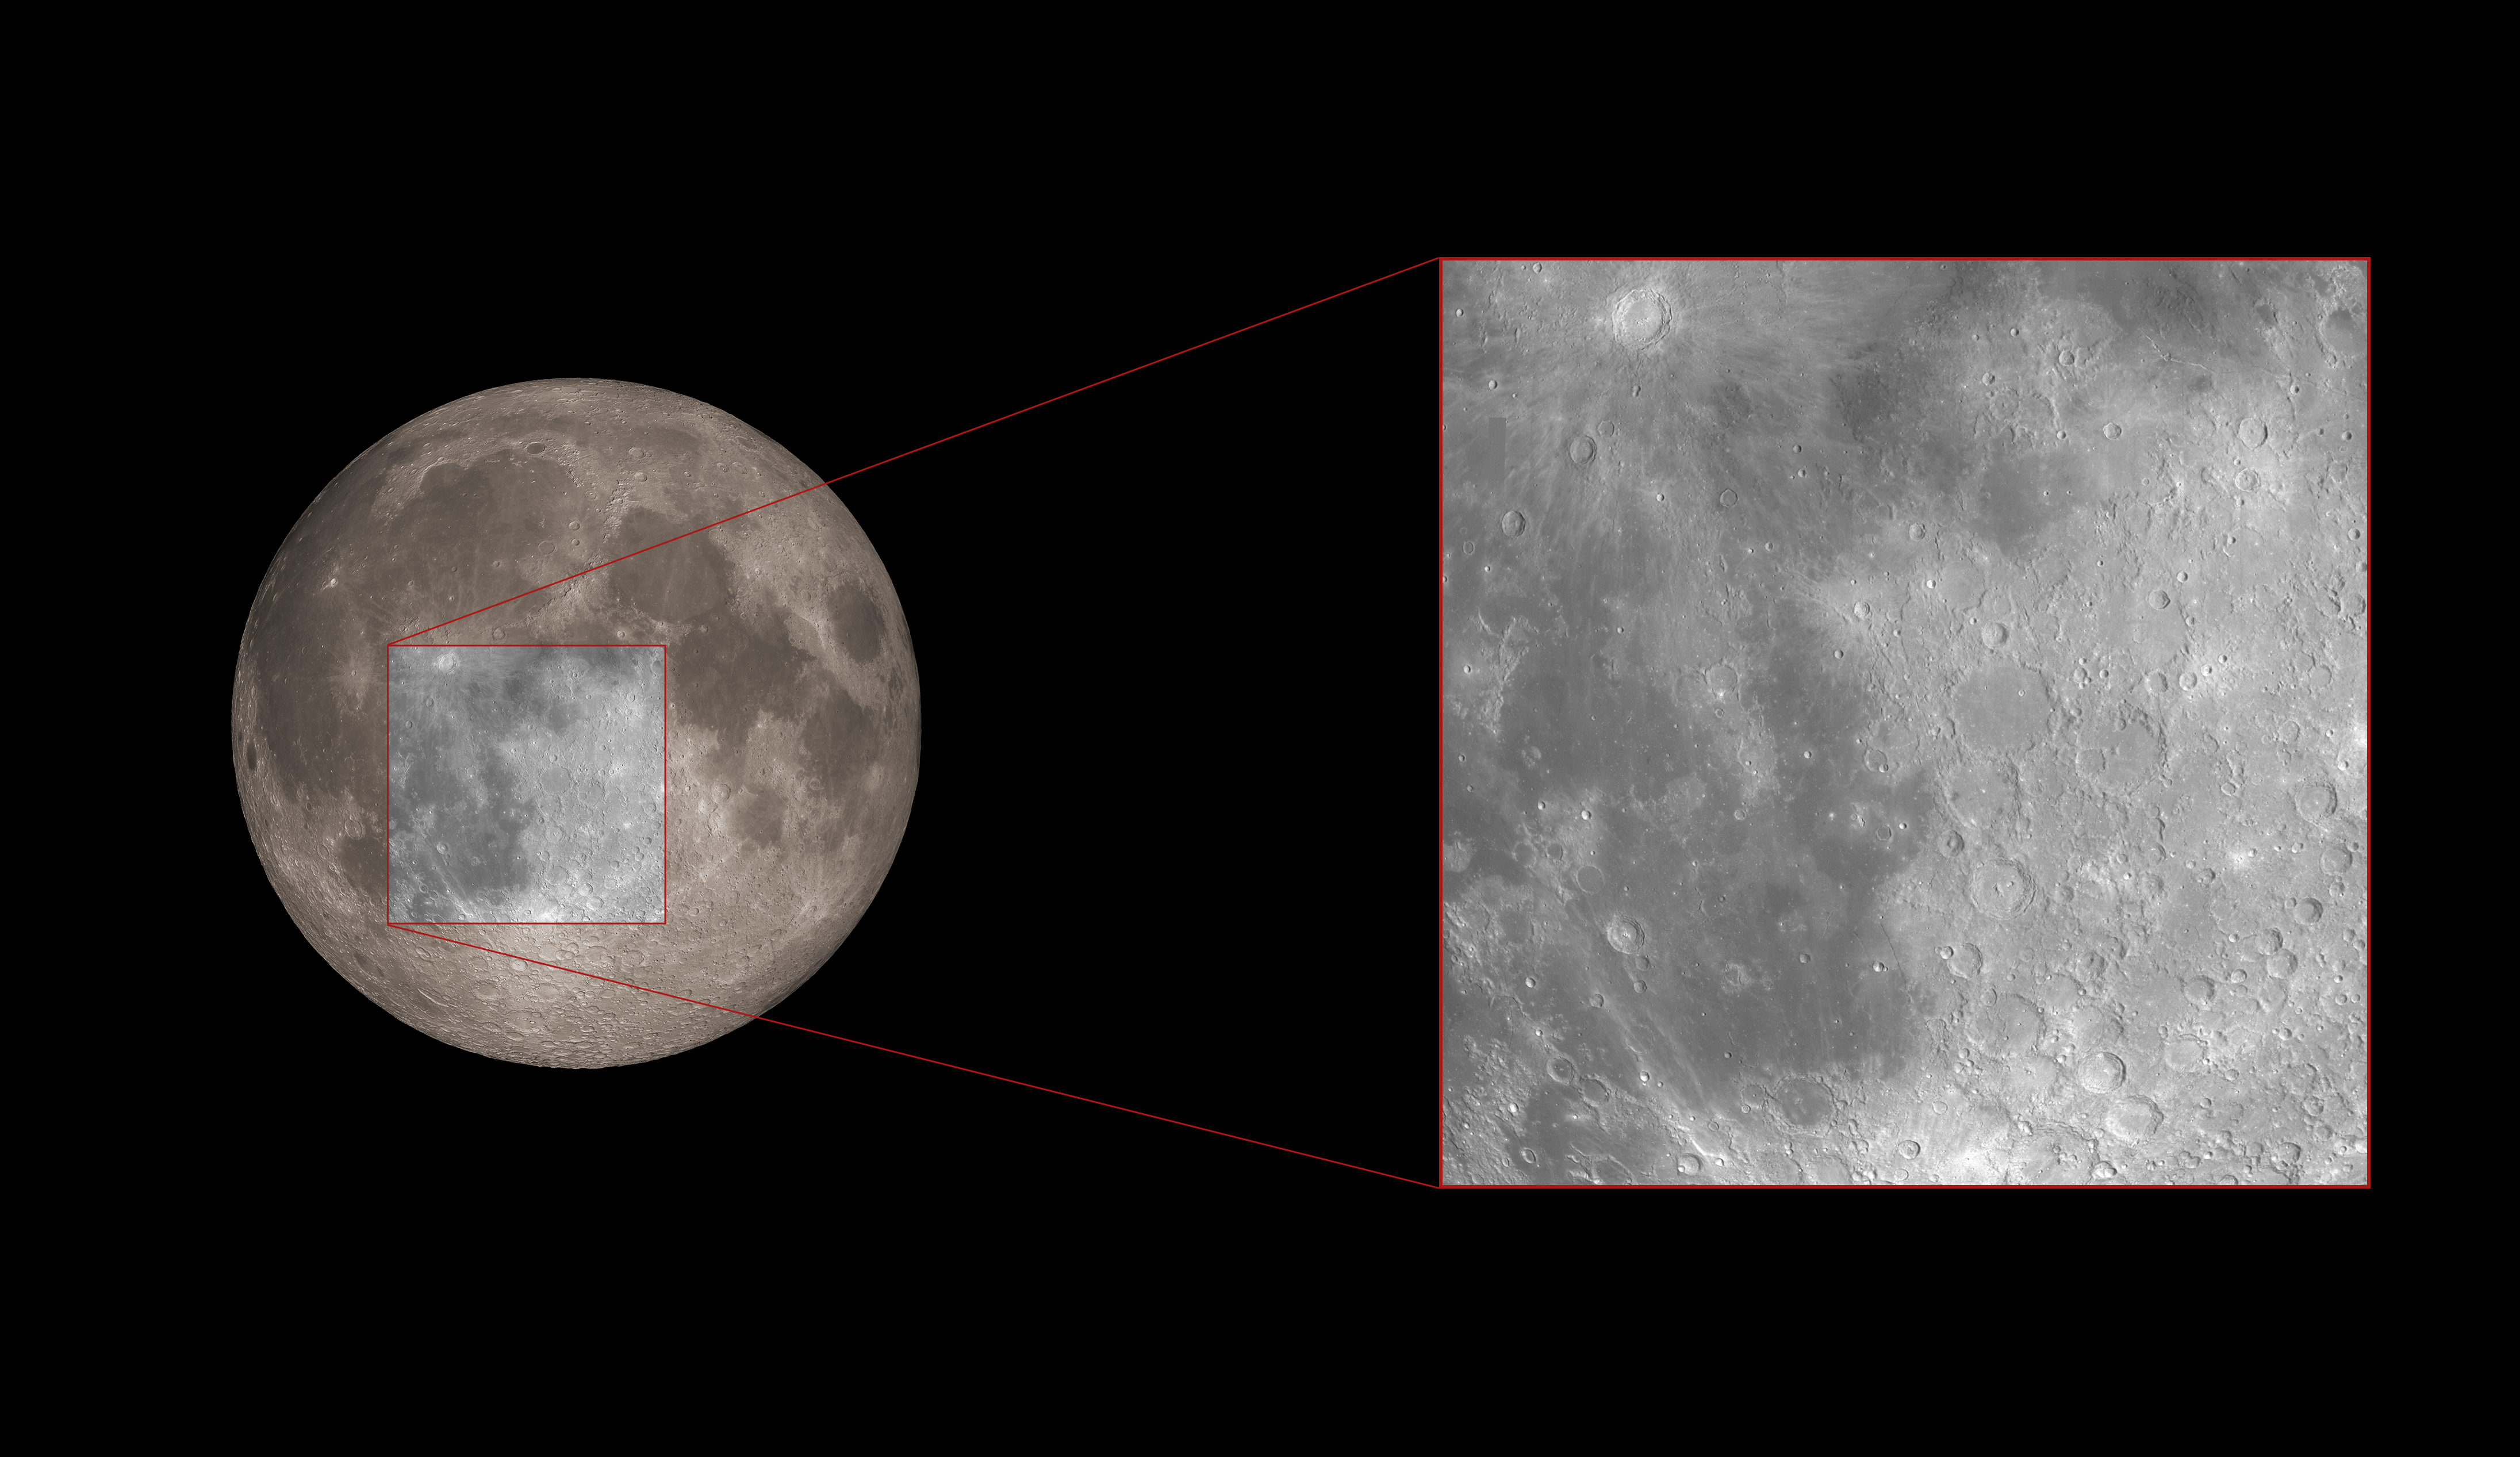

Hubble’s Region of Study During the Lunar Eclipse

This image highlights the general region where astronomers used the NASA/ESA Hubble Space Telescope to measure the amount of ozone in Earth’s atmosphere. This method serves as a proxy for how they will observe Earth-like planets around other stars in search of life.

Credit: ESA/Hubble, M. Kornmesser